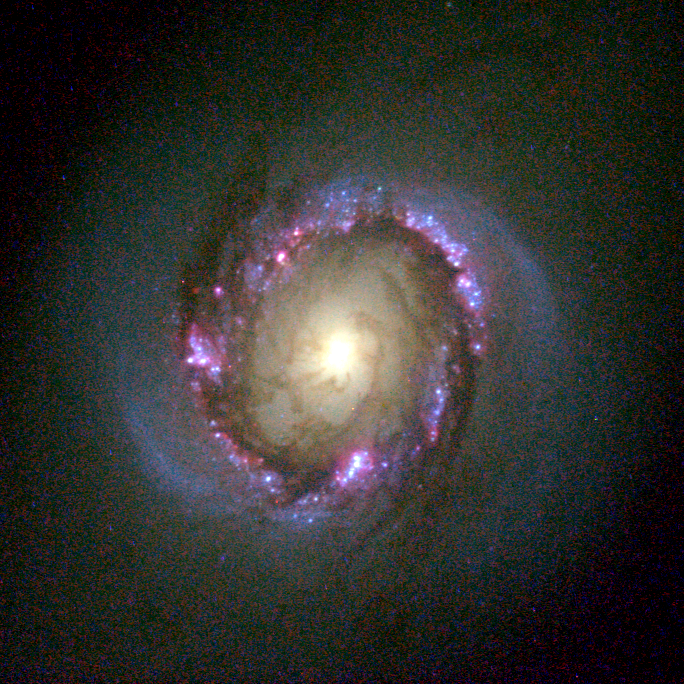

Galaxy NGC 4314 (Hubble view)

This close-up view by Hubble also shows other interesting details in the galaxy's core: dust lanes, a smaller bar of stars, dust and gas embedded in the stellar ring, and an extra pair of spiral arms packed with young stars. These details make the centreresemble a miniature version of a spiral galaxy. While it is not unusual to have dust lanes and rings of gas in the centers of galaxies, it is uncommon to have spiral arms full of young stars in the cores. NGC 4314 is one of the nearest (only 40 million light-years away in the constellation Coma Berenices) examples of a galaxy with a ring of infant stars close to the core. This stellar ring - whose radius is 1,000 light-years - is a great laboratory to study star formation in galaxies.

Credit: G. Fritz Benedict, Andrew Howell, Inger Jorgensen, David Chapell (University of Texas), Jeffery Kenney (Yale University), and Beverly J. Smith (CASA, University of Colorado), and NASA/ESA.